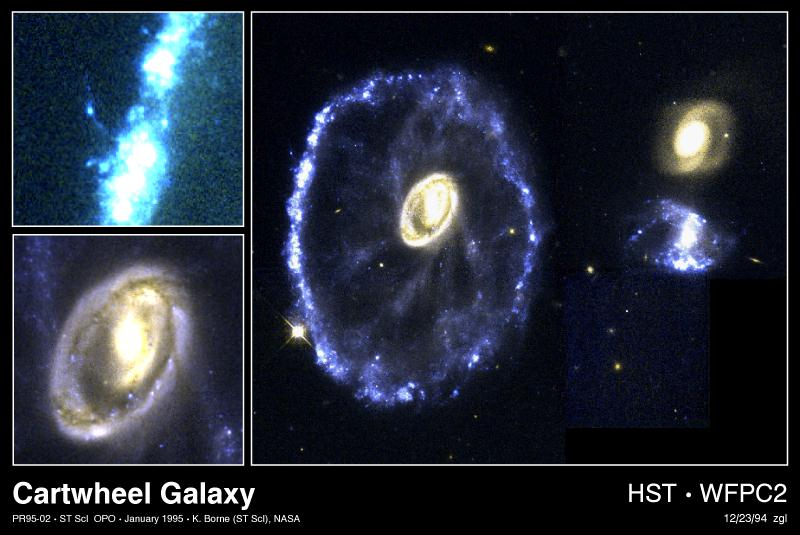

The Cartwheel Galaxy

Right Image

A rare and spectacular head-on collision between two galaxies appears in this Hubble Space Telescope true-color image of the Cartwheel Galaxy, located 500 million light-years away in the constellation Sculptor. The new details of star birth resolved by Hubble provide an opportunity to study how extremely massive stars are born in large fragmented gas clouds.

Top Left Image

Hubble's detailed view shows the knot-like structure of the ring, produced by large clusters of new star formation. Hubble also resolves the effects of thousands of supernovae on the ring structure. One flurry of explosions blew a hole in the ring and formed a giant bubble of hot gas. Secondary star formation on the edge of this bubble appears as an arc extending beyond the ring.

Bottom Left Image

Hubble resolves remarkable new detail in the galaxy's core. The reddish colour of this region indicates that it contains a tremendous amount of dust and embedded star formation. Bright pinpoints of light are gigantic young star clusters.

Credit: Kirk Borne (ST ScI), and NASA/ESA